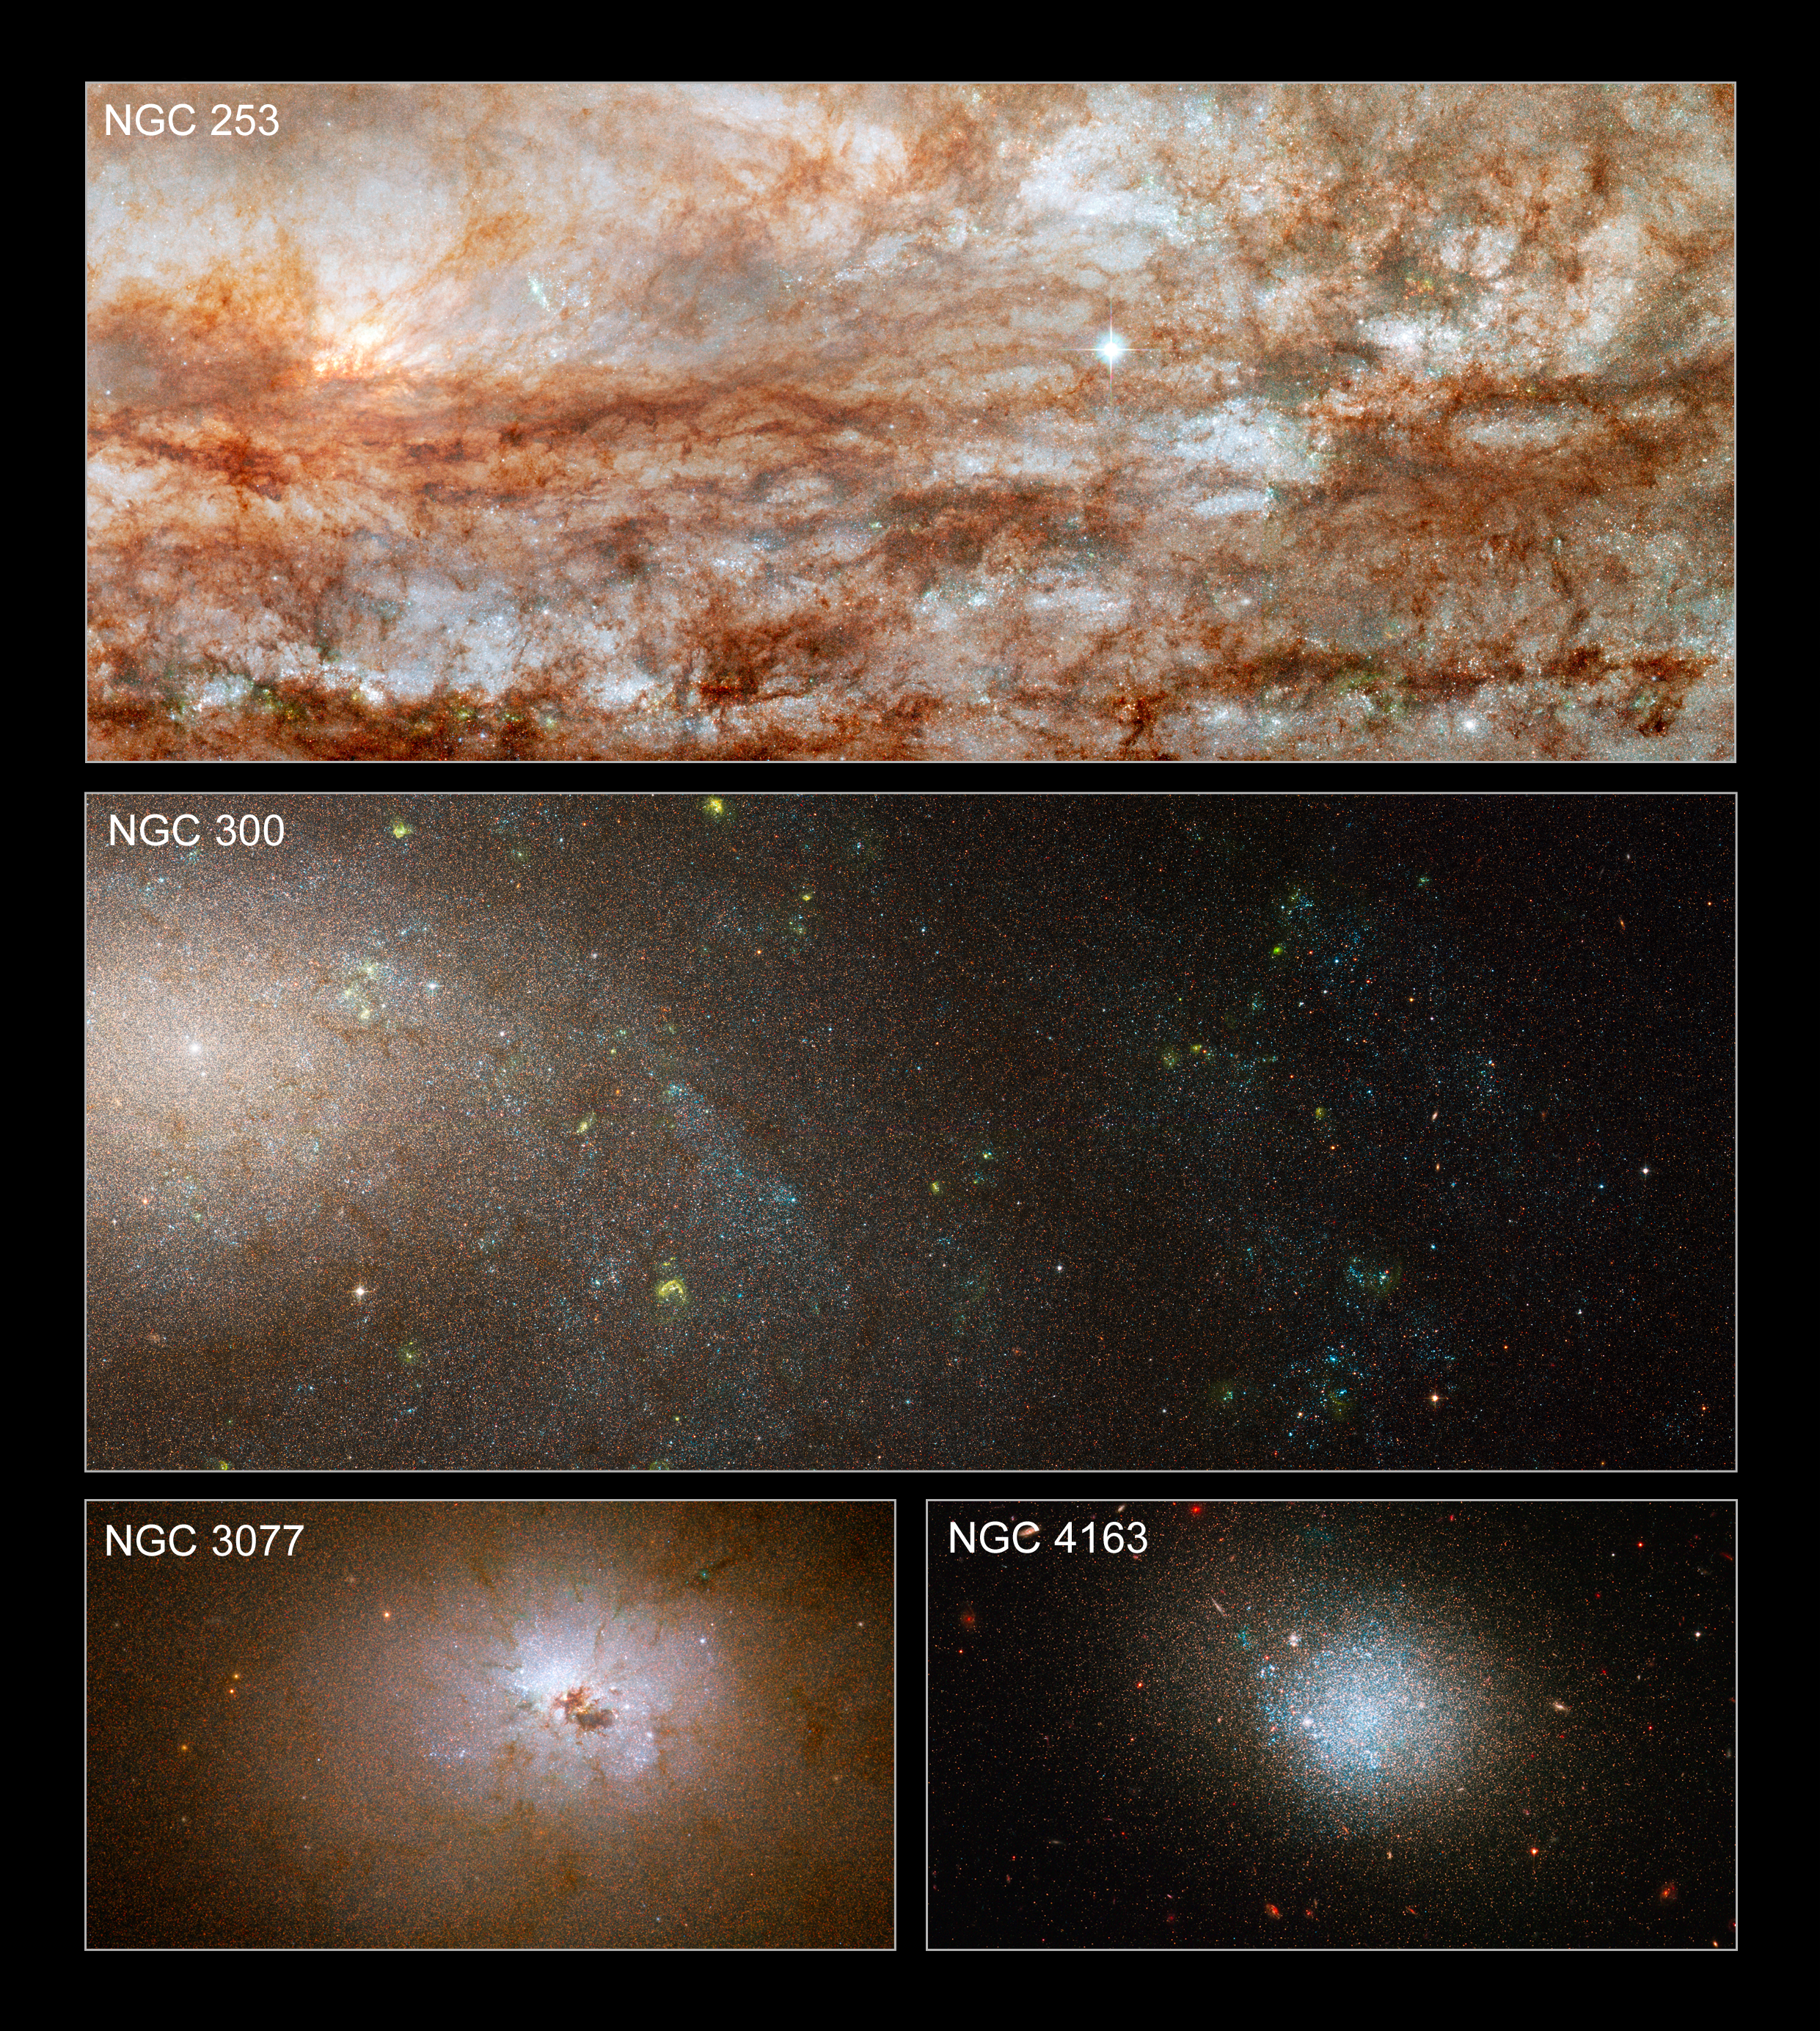

Hubble snaps close-up views of diverse galaxies

These images taken with the NASA/ESA Hubble Space Telescope are close-up views of four galaxies from a large survey of nearby galaxies.

The galaxies have very different masses and sizes and showcase the diversity found in the ANGST study. Although the galaxies are separated by many light-years, they are presented as if they are all at the same distance to show their relative sizes.

The images, taken with Hubble's Advanced Camera for Surveys, reveal rich detail in the stellar populations and in the interstellar dust scattered between the stars. Hubble's sharp views reveal the colours and brightness of individual stars, which astronomers used to derive the history of star formation in each galaxy.

In the composite image at the top, NGC 253 is ablaze with the light from thousands of young, blue stars. The spiral galaxy is undergoing intense star formation. The image demonstrates the sharp "eye" of the Advanced Camera, which resolved individual stars. The dark filaments are clouds of dust and gas. NGC 253 is the dominant galaxy in the Sculptor Group of galaxies and it resides about 13 million light-years from Earth.

In the view of the spiral galaxy NGC 300, second from top, young, blue stars are concentrated in spiral arms that sweep diagonally through the image. The yellow blobs are glowing hot gas that has been heated by radiation from the nearest young, blue stars. NGC 300 is a member of the Sculptor Group of galaxies and it is located 7 million light-years away.

The dark clumps of material scattered around the bright nucleus of NGC 3077, the small, dense galaxy at bottom, left, are pieces of wreckage from the galaxy's interactions with its larger neighbours. NGC 3077 is a member of the M81 group of galaxies and it resides 12.5 million light-years from Earth.

The image at bottom, right, shows a swarm of young, blue stars in the diffuse dwarf irregular galaxy NGC 4163. NGC 4163 is a member of a group of dwarf galaxies near our Milky Way and is located roughly 10 million light-years away.

These galaxies are part of a detailed survey called the ACS Nearby Galaxy Survey Treasury (ANGST) program. In the census, Hubble observed roughly 14 million stars in 69 galaxies. The survey explored a region called the "Local Volume", and the galaxy distances ranged from 6.5 million light-years to 13 million light-years from Earth. The Local Volume resides beyond the Local Group of galaxies, an even nearer collection of a few dozen galaxies within about 3 million light-years of our Milky Way Galaxy.

The natural-colour images were constructed using observations taken in infrared, visible, and blue light. The observations of NGC 253 and NGC 300 were taken in September 2006; of NGC 3077 in November 2006; and of NGC 4163 in December 2006.

Credit: NASA, ESA, J. Dalcanton and B. Williams (University of Washington)